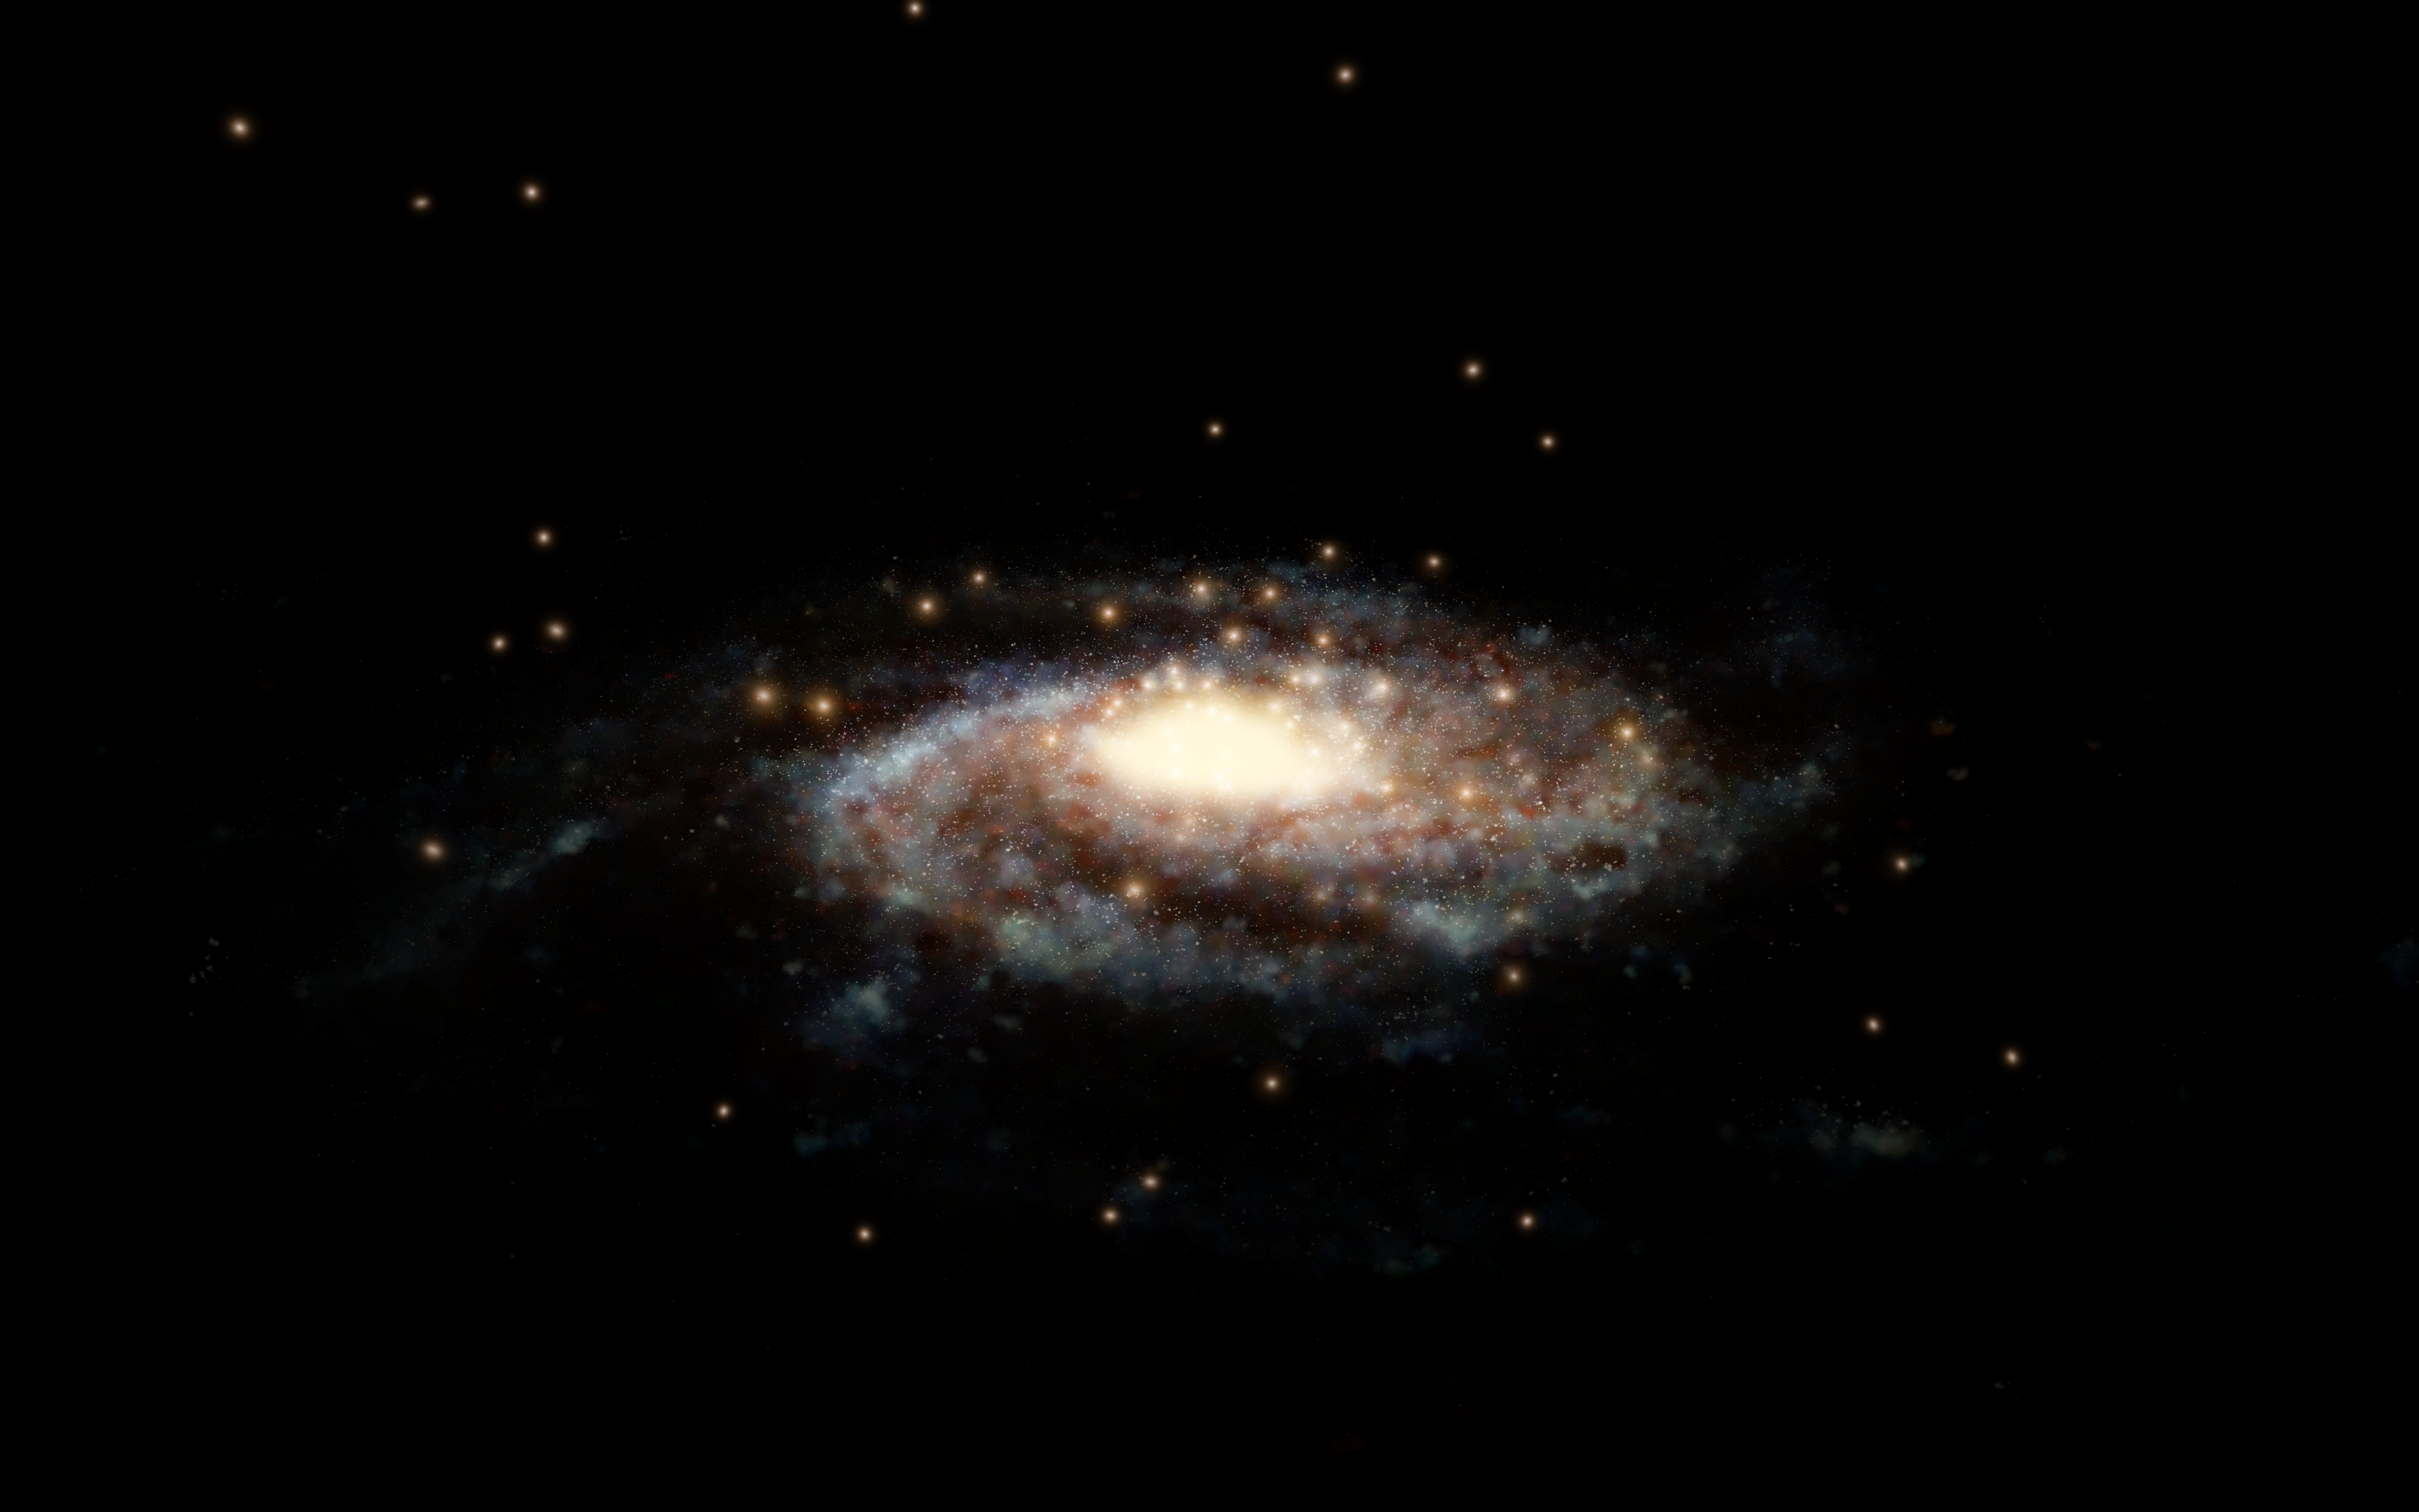

Globular clusters surrounding the Milky Way (artist’s impression)

This artist’s impression shows a computer generated model of the Milky Way and the accurate positions of the globular clusters used in this study surrounding it.

Scientists used the measured velocities of these 44 globular clusters to determine the total mass of the Milky Way, our cosmic home.

Credit: ESA/Hubble, NASA, L. Calçada